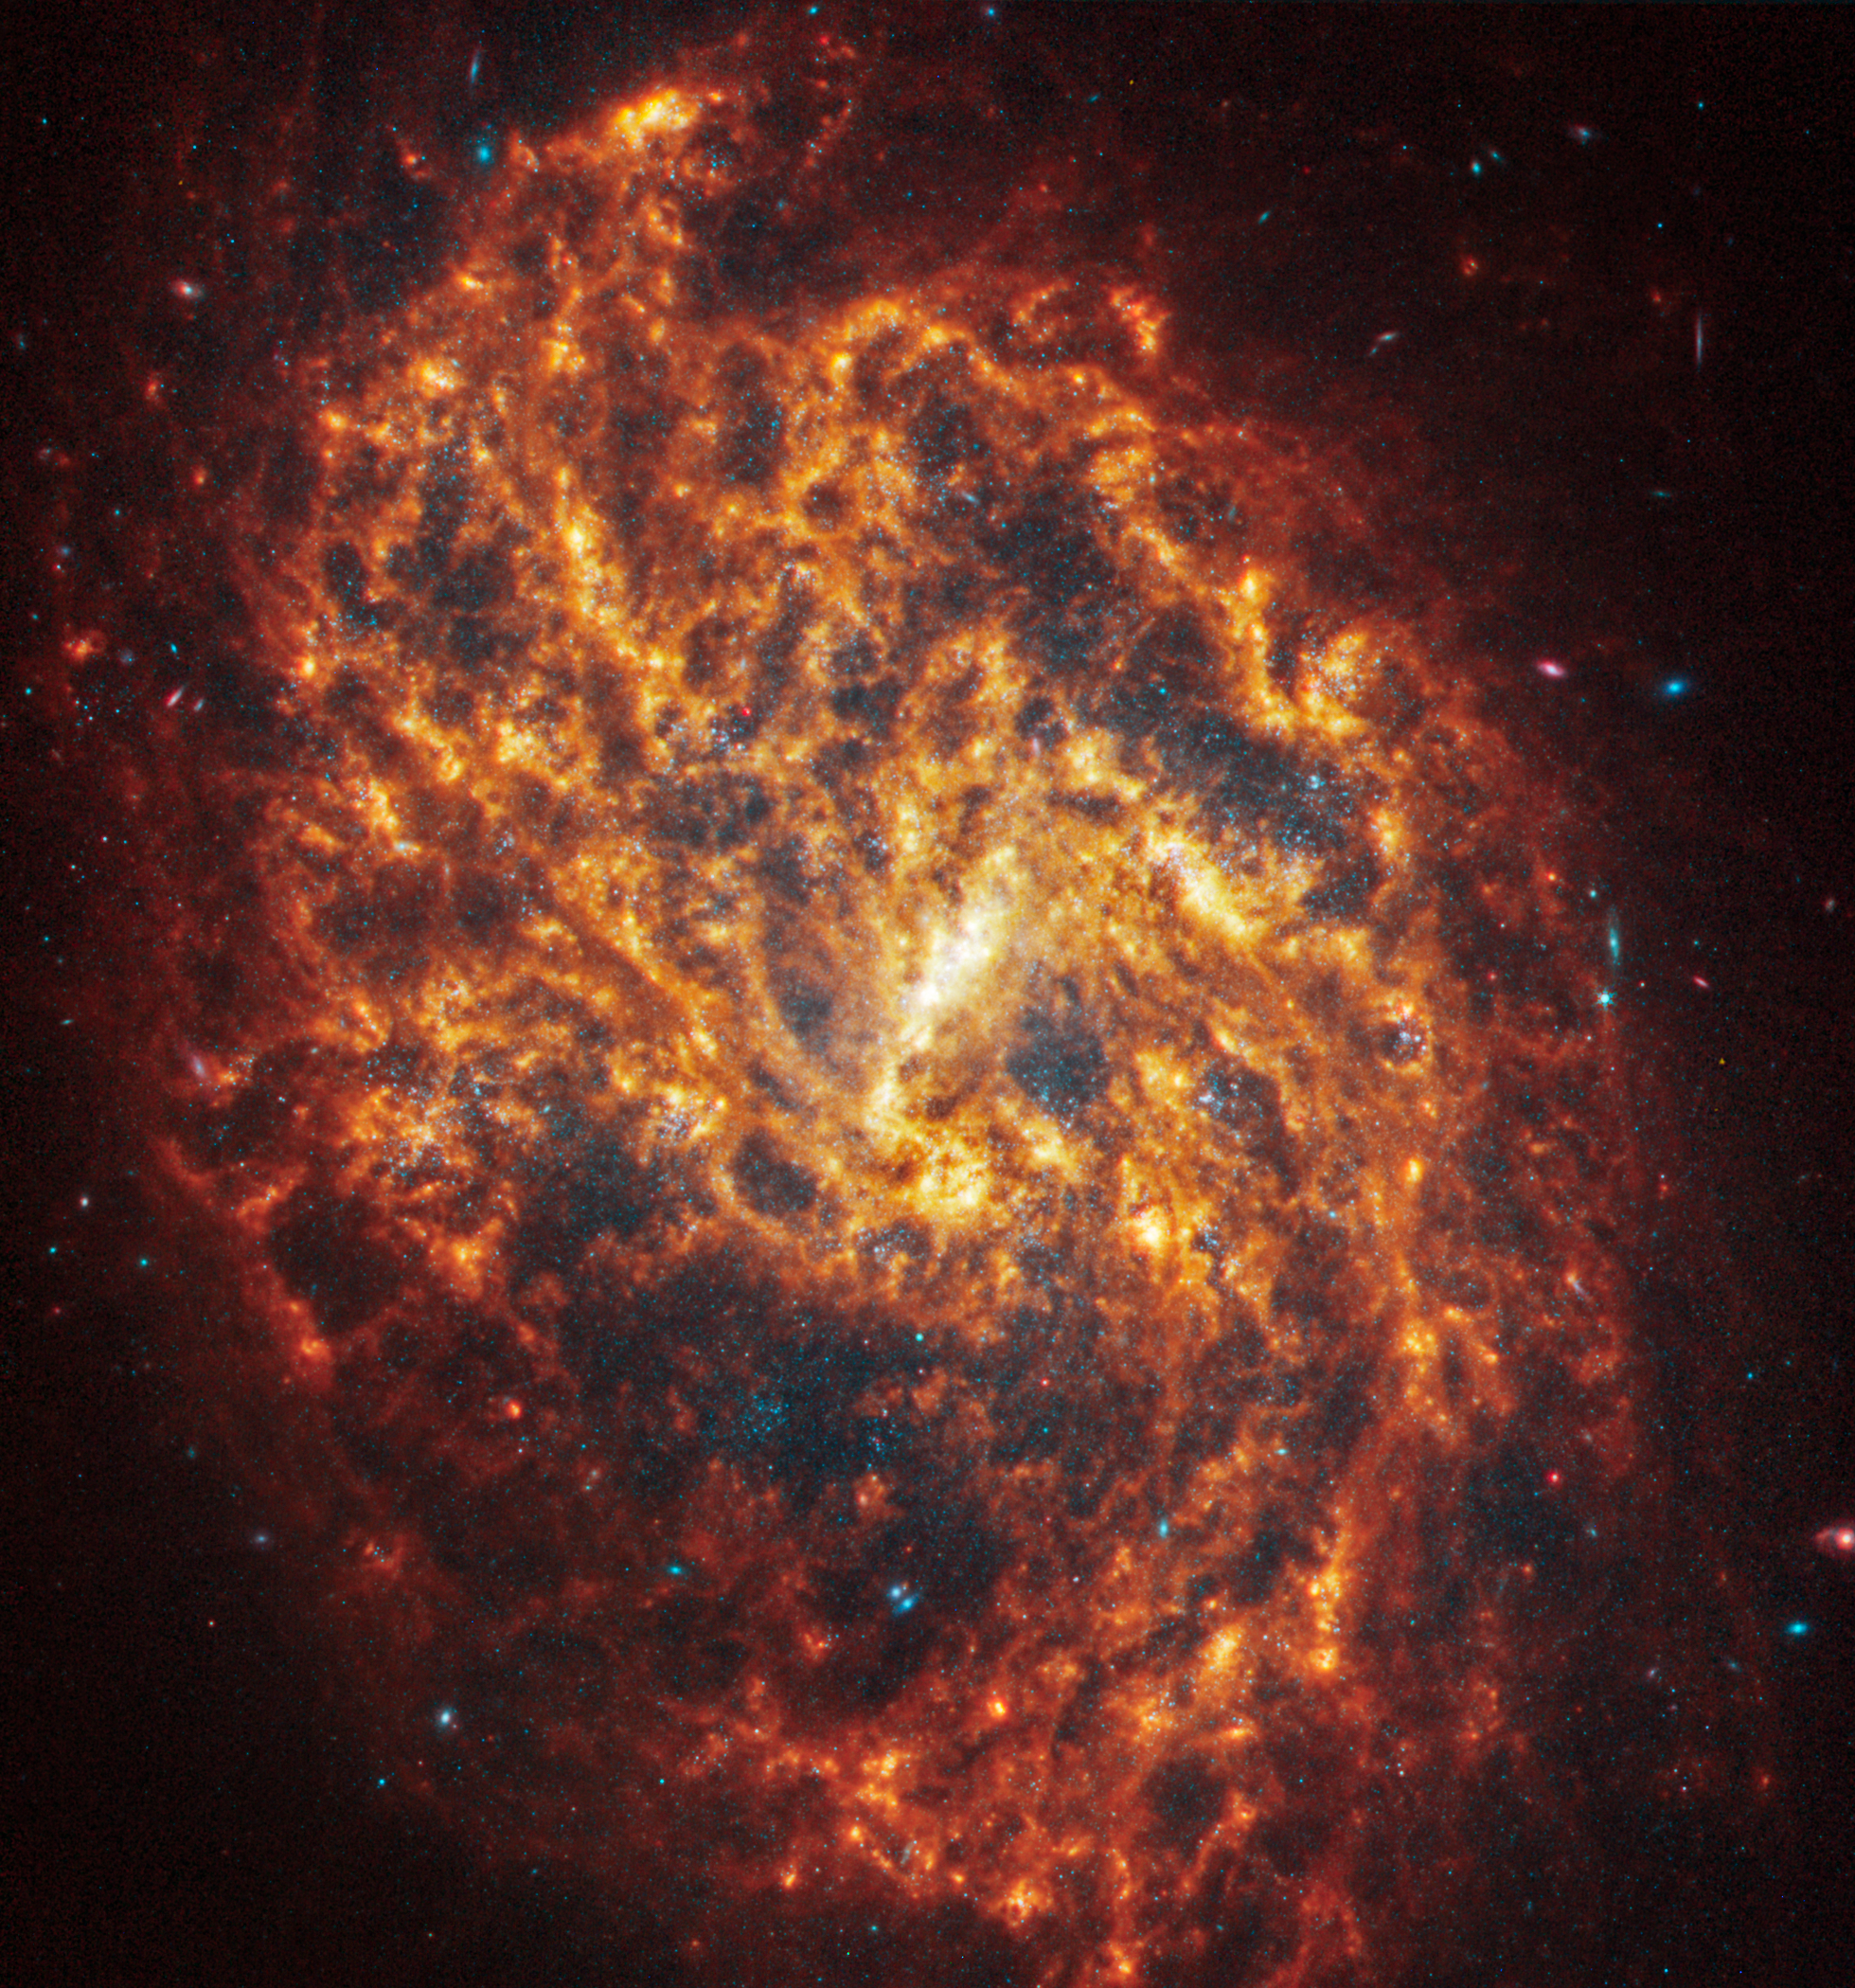

NGC 1087

This spiral galaxy was observed as part of the Physics at High Angular resolution in Nearby GalaxieS (PHANGS) program, a large project that includes observations from several space- and ground-based telescopes of many galaxies to help researchers study all phases of the star formation cycle, from the formation of stars within dusty gas clouds to the energy released in the process that creates the intricate structures revealed by Webb’s new images.

NGC 1087 is 80 million light-years away in the constellation Cetus.

Learn more about what can be seen in this vast collection of Webb images here.

Credit: NASA, ESA, CSA, STScI, J. Lee (STScI), T. Williams (Oxford), R. Chandar (UToledo), PHANGS Team